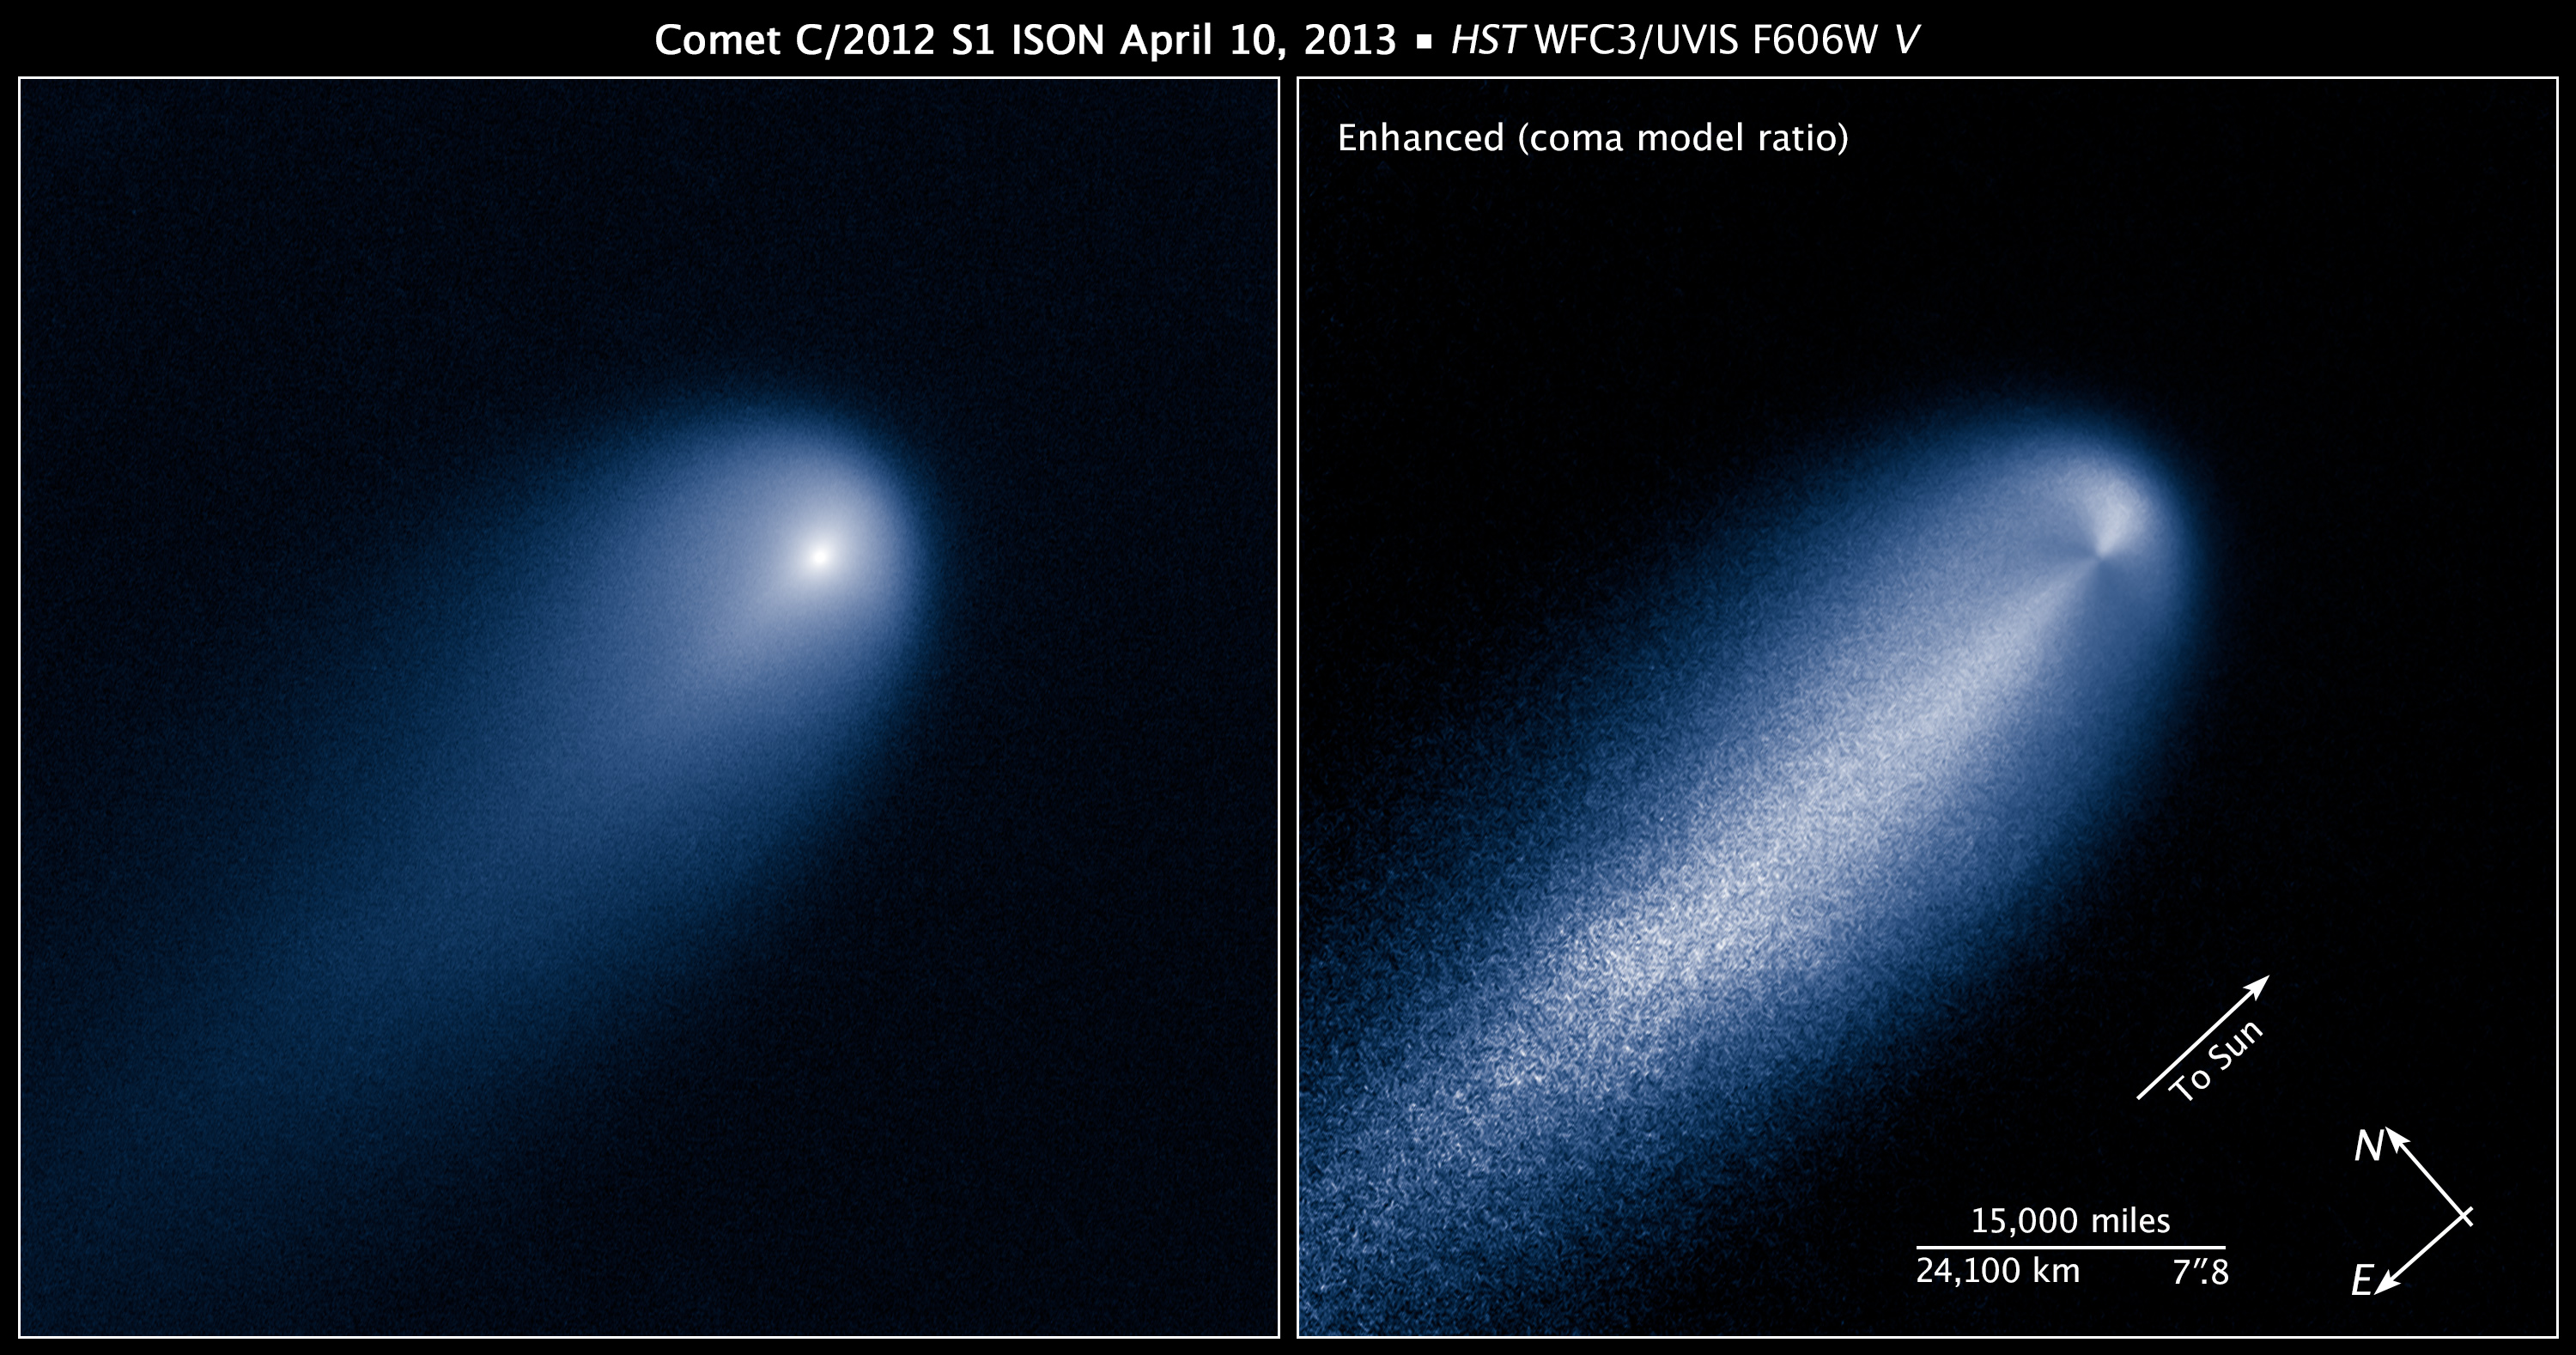

Compass and scale image for Comet ISON

Collage image of Comet C/2012 S1 (ISON, composed from images taken by the NASA/ESA Hubble Space Telescope.

Credit: NASA, ESA, J.-Y. Li (Planetary Science Institute), and the Hubble Comet ISON Imaging Science Team